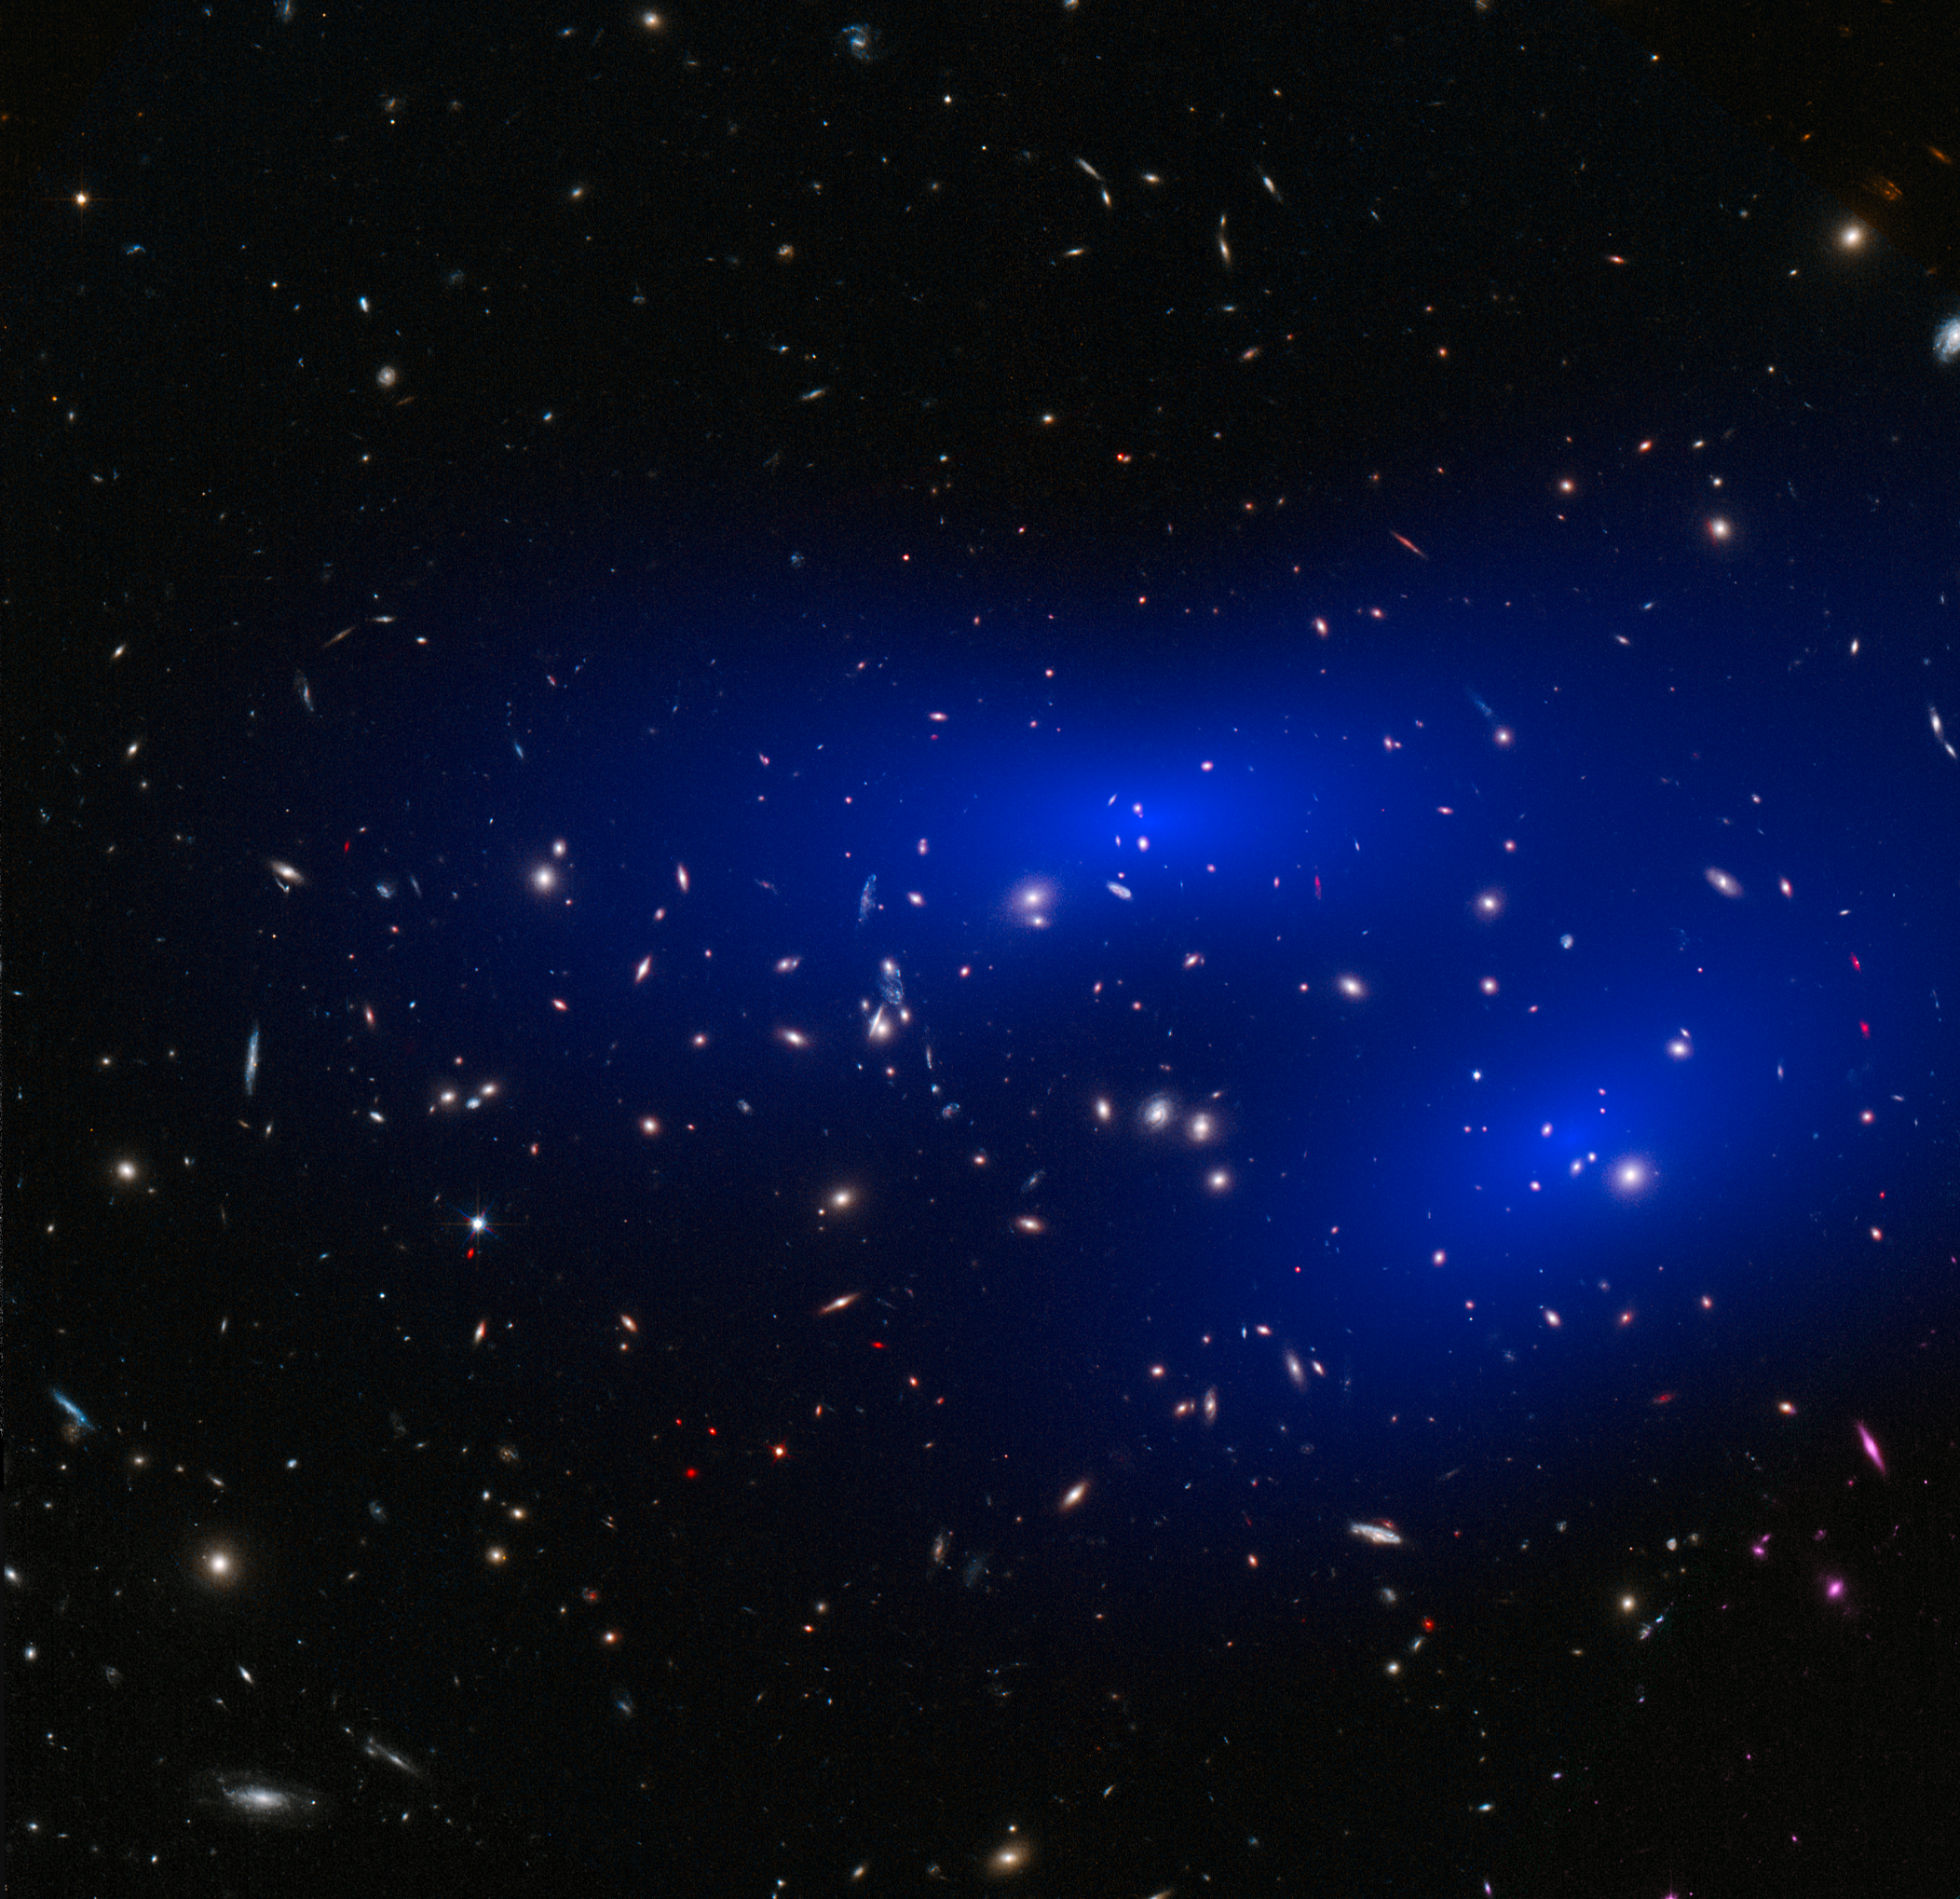

Galaxy cluster MACS J0152.5-2852 with dark matter map

This is a NASA/ESA Hubble Space Telescope image of the galaxy cluster MACS J0152.5-2852. Shown in blue on the image is a map of the dark matter found within the cluster. This cluster was part of a study of 72 galaxy cluster collisions which determined that dark matter interacts with other dark matter even less than previously thought.

Credit: NASA, ESA, D. Harvey (École Polytechnique Fédérale de Lausanne, Switzerland)and R. Massey (Durham University, UK)